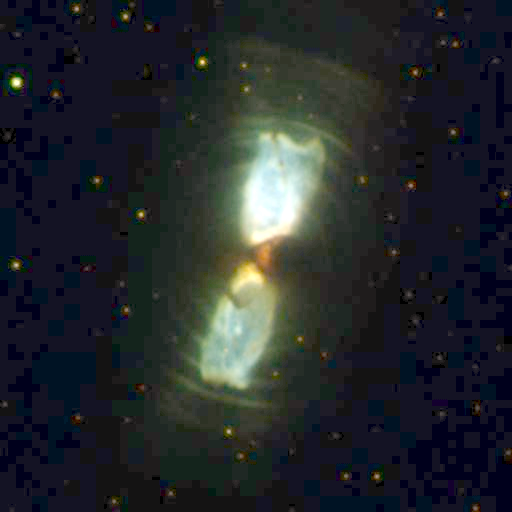

Planetary Nebula IRAS 17150-3224

The Hubble Space Telescope's Wide Field and Planetary Camera 2has captured images of the birth of two planetary nebulae as they emerge from wrappings of gas and dust, like butterflies breaking out of their cocoons.

Credit: Sun Kwok and Kate Su (University of Calgary), Bruce Hrivnak (Valparaiso University), and NASA/ESA